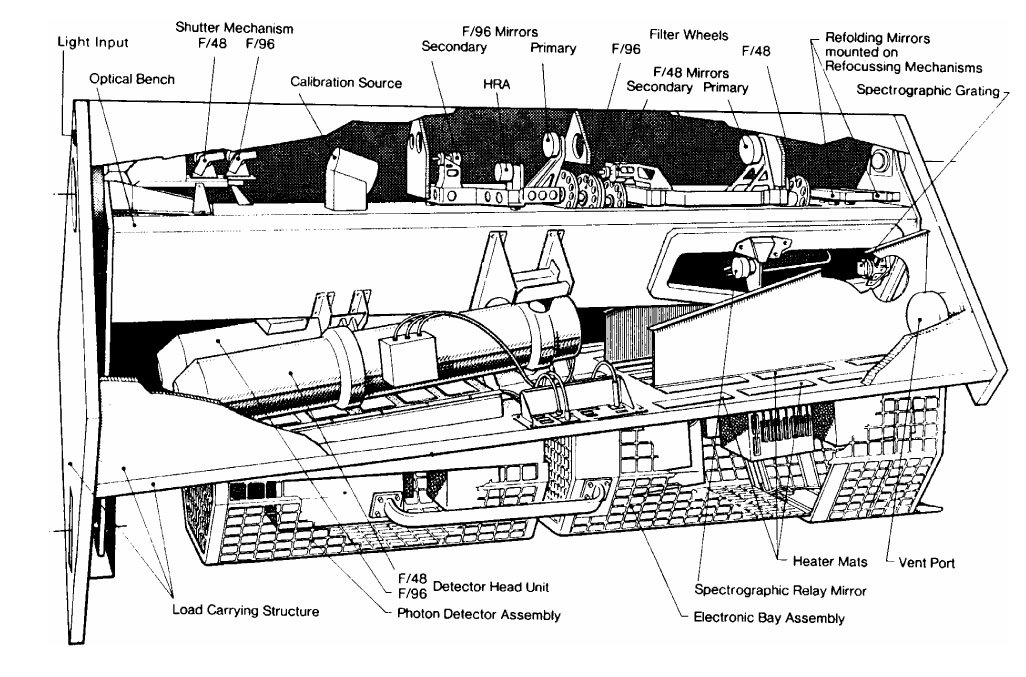

Diagram of FOC

This is a diagram of the Faint Object Camera.

Credit: ESA